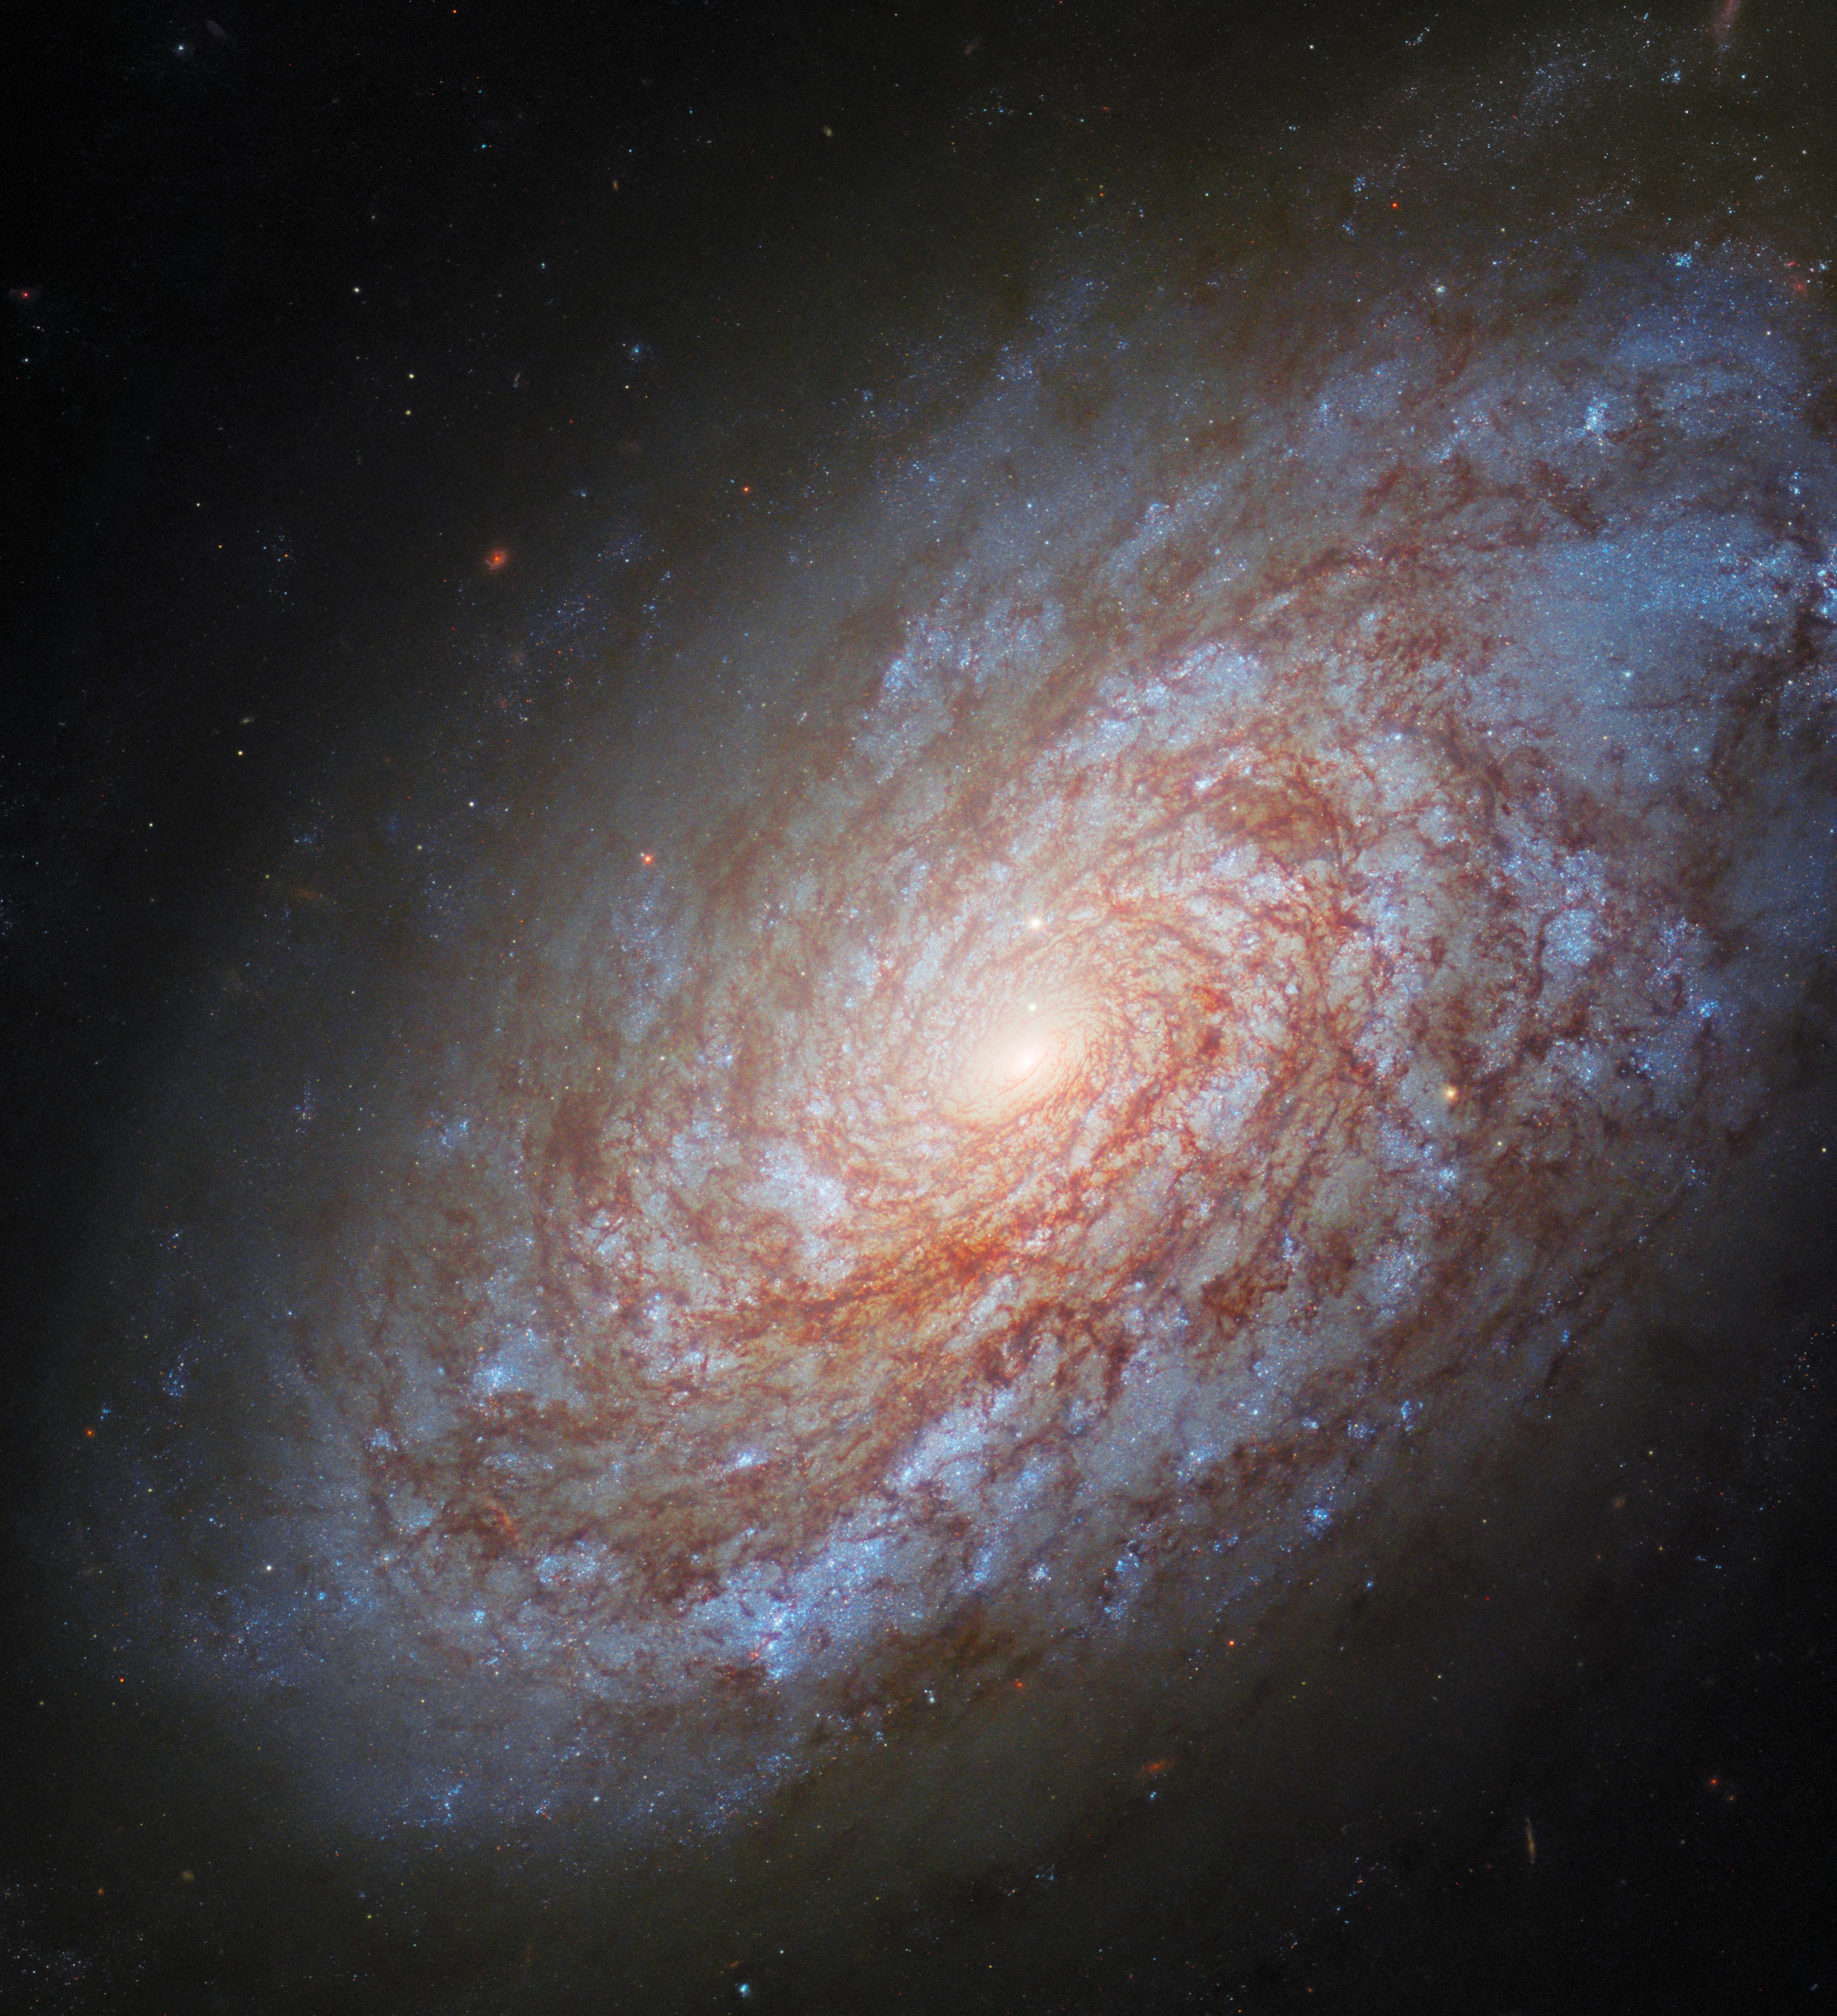

Revisiting an old beauty

This image from the NASA/ESA Hubble Space Telescope features the unbarred spiral galaxy NGC 4414, roughly 51 million light-years away from Earth in the constellation Coma Berenices.

You can see an old image of NGC 4414 that features Hubble data from 1995 and 1999 here, which was captured as one of the telescope’s primary missions to determine the distance to galaxies. This was achieved as part of an ongoing research effort to study Cepheid variable stars. Cepheids are a special type of variable star with very stable and predictable brightness variations. The period of these variations depends on physical properties of the stars such as their mass and true brightness. This means that astronomers, just by looking at the variability of their light, can find out about the Cepheids' physical nature, which then can be used very effectively to determine their distance. For this reason cosmologists call Cepheids 'standard candles'.

Astronomers have used Hubble to observe Cepheids, like those that reside in NGC 4414, with extraordinary results. The Cepheids have then been used as stepping-stones to make distance measurements for supernovae, which have, in turn, given a measure for the scale of the Universe. Today we know the age of the Universe to a much higher precision than before Hubble: around 13.7 billion years.

Credit: ESA/Hubble & NASA, O. Graur, S. W. Jha, A. Filippenko